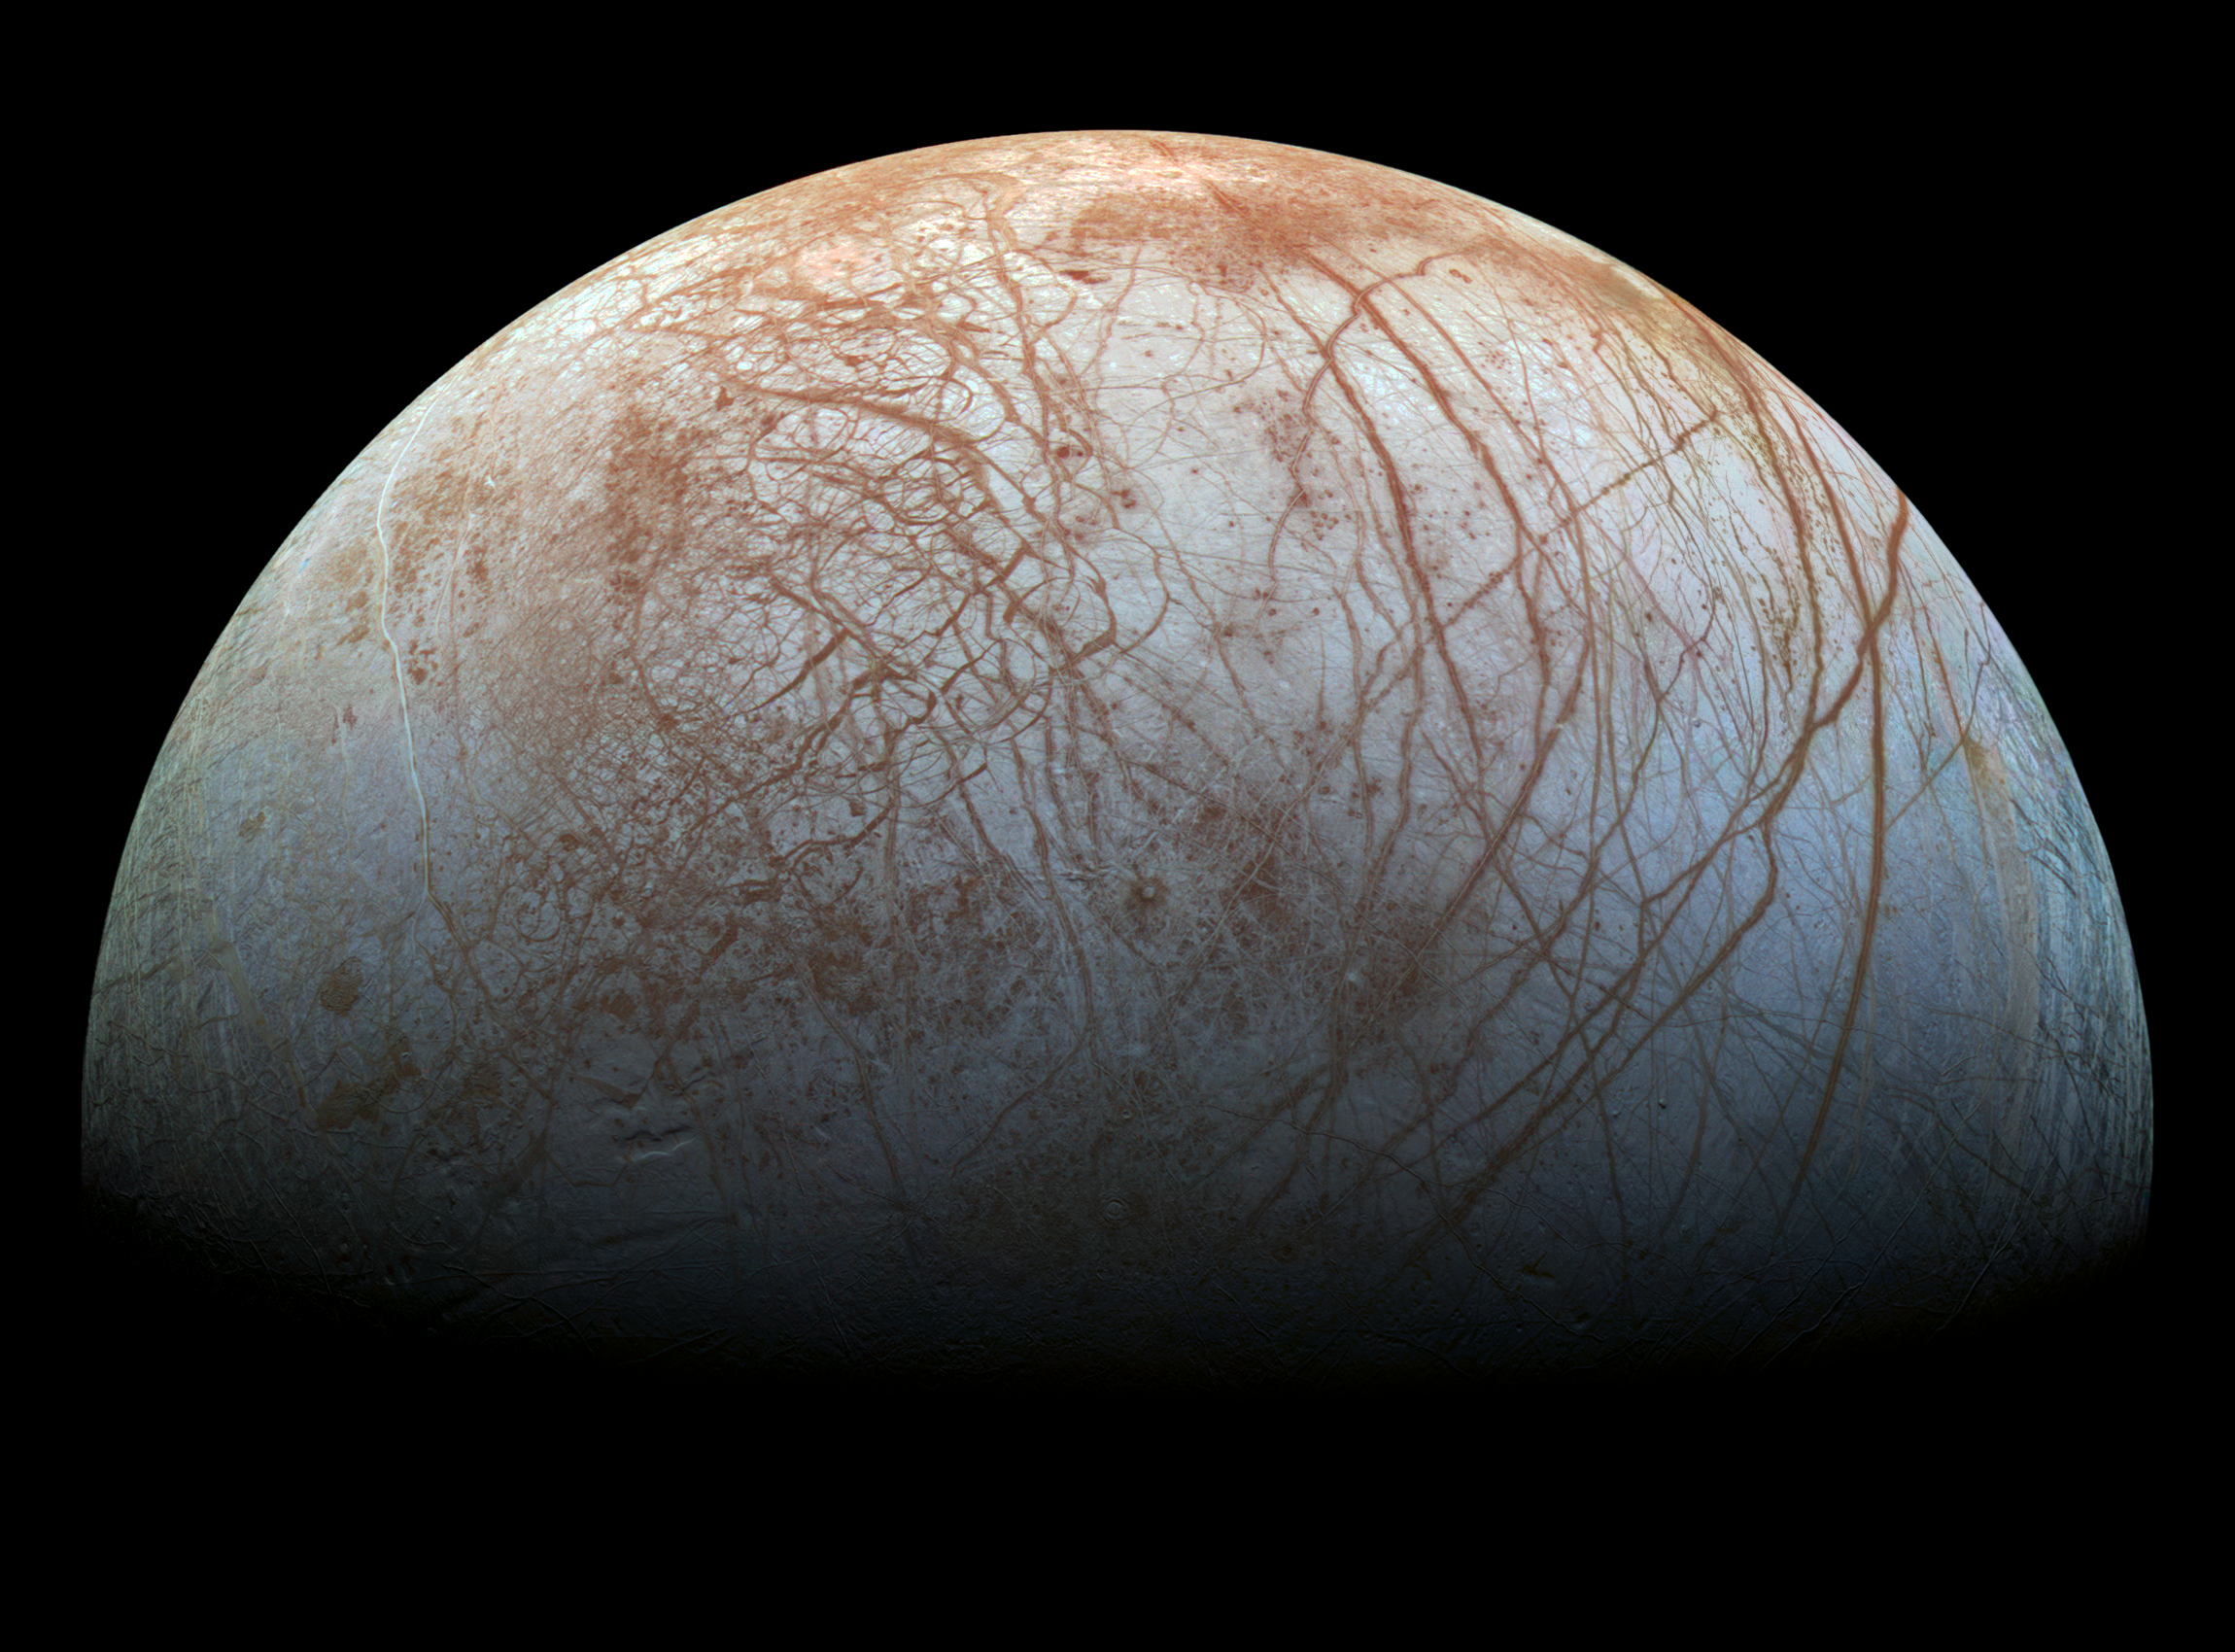

Galileo Spacecraft’s Image of Europa

This reprocessed colour view of Jupiter’s moon Europa was made from images taken by NASA's Galileo spacecraft in the late 1990s.

Credit: NASA/JPL-Caltech/SETI Institute